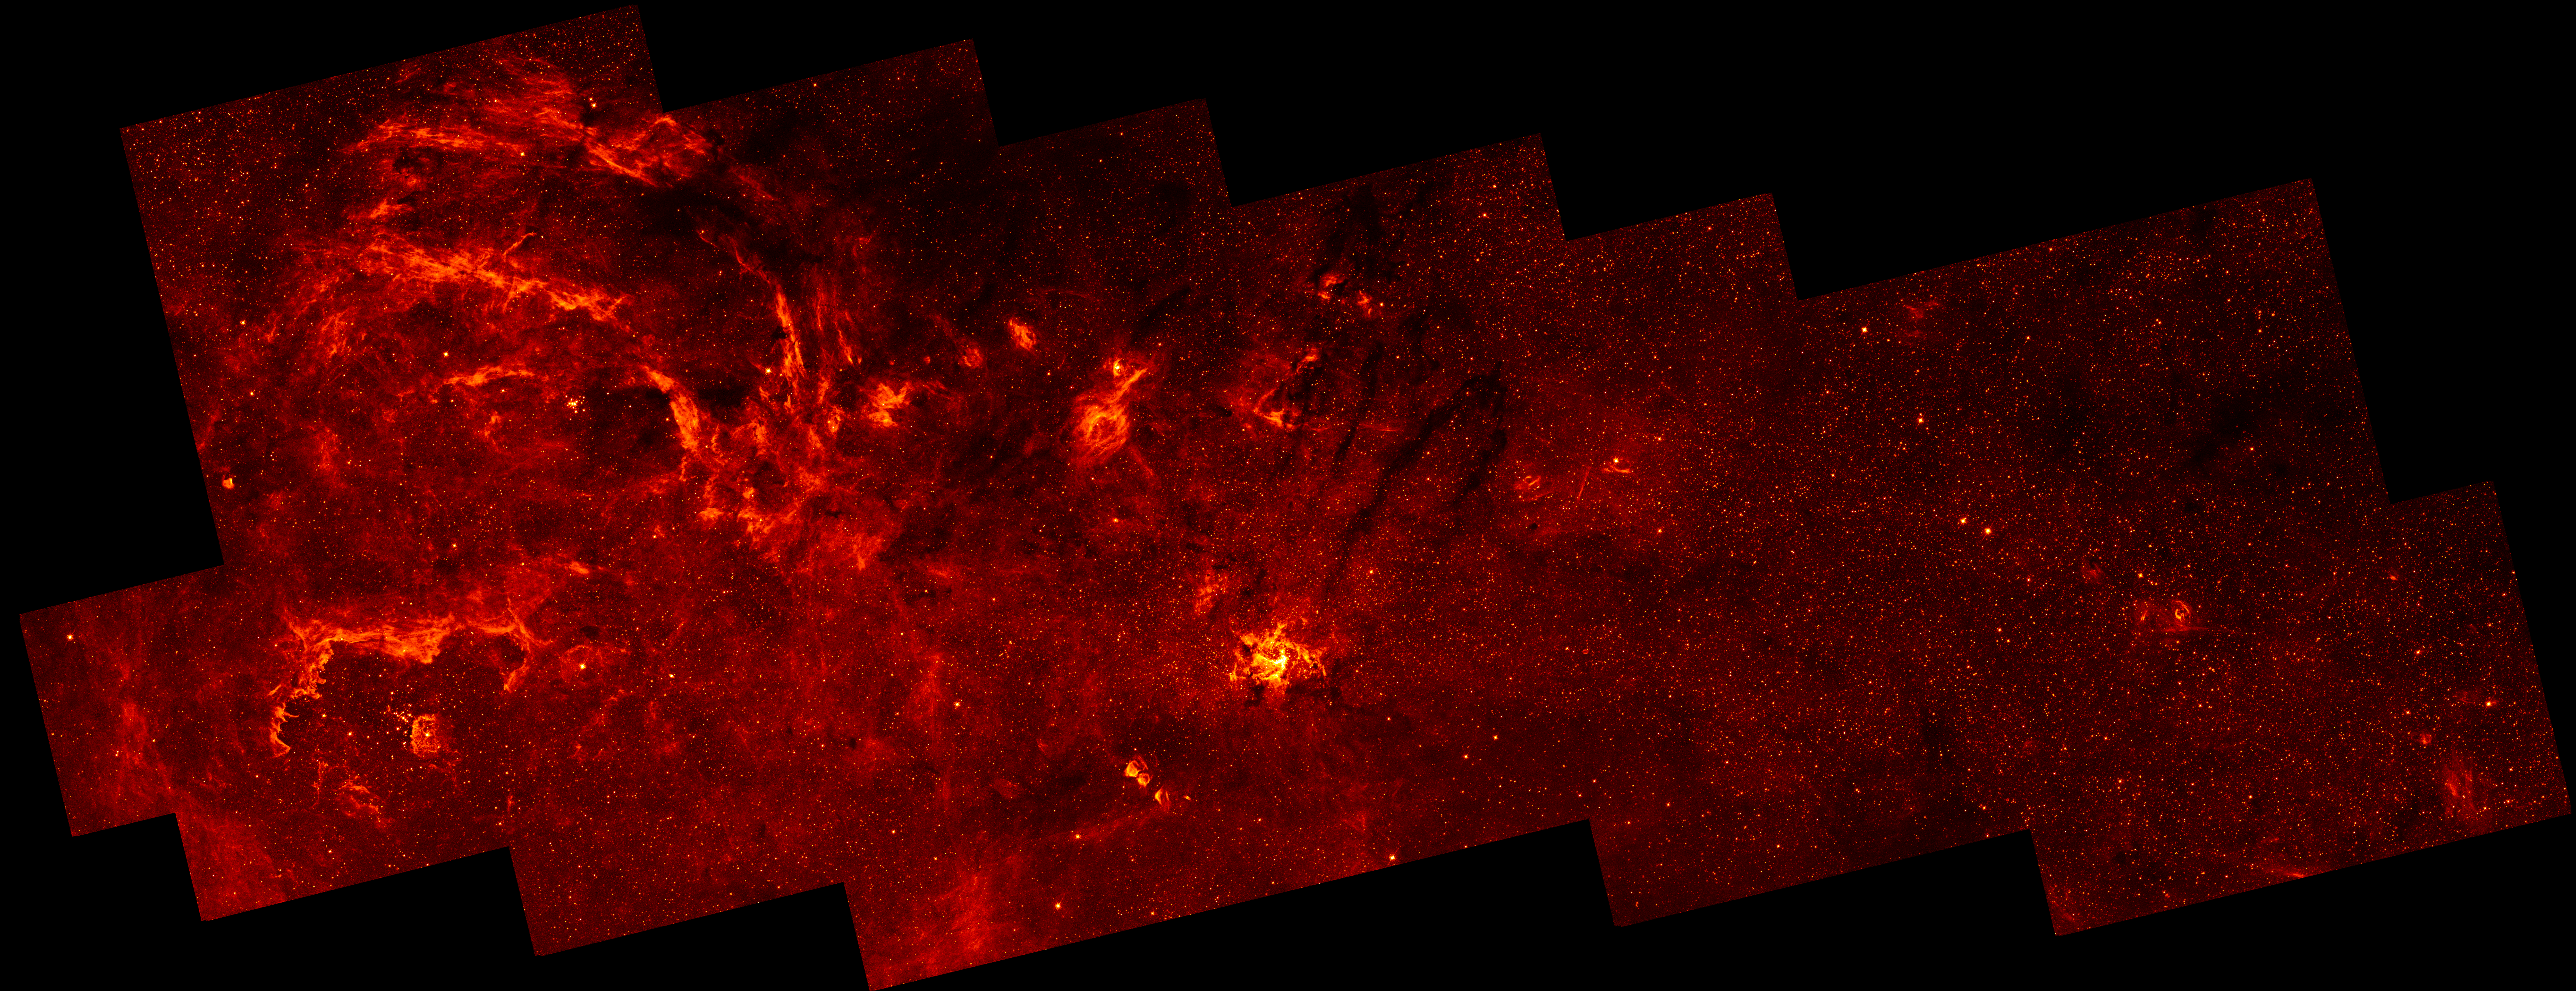

Mosaic of the galactic centre

This NASA/ESA Hubble Space Telescope infrared mosaic image represents the sharpest survey of the galactic centre to date. It reveals a new population of massive stars and new details in complex structures in the hot ionized gas swirling around the central 300 x 115 light-years. This sweeping infrared panorama offers a nearby laboratory for how massive stars form and influence their environment in the often violent nuclear regions of other galaxies.

The infrared mosaic was taken with Hubble's Near Infrared Camera and Multi-Object Spectrometer (NICMOS). The Galactic core is obscured in visible light by intervening dust clouds, but infrared light penetrates the dust. The spatial resolution of this image corresponds to 0.025 light-years at the distance of the Galactic core of 26 000 light-years. Hubble reveals details in objects as small as 20 times the size of our own Solar System.

Credit: NASA, ESA and Q.D. Wang (University of Massachusetts, Amherst)